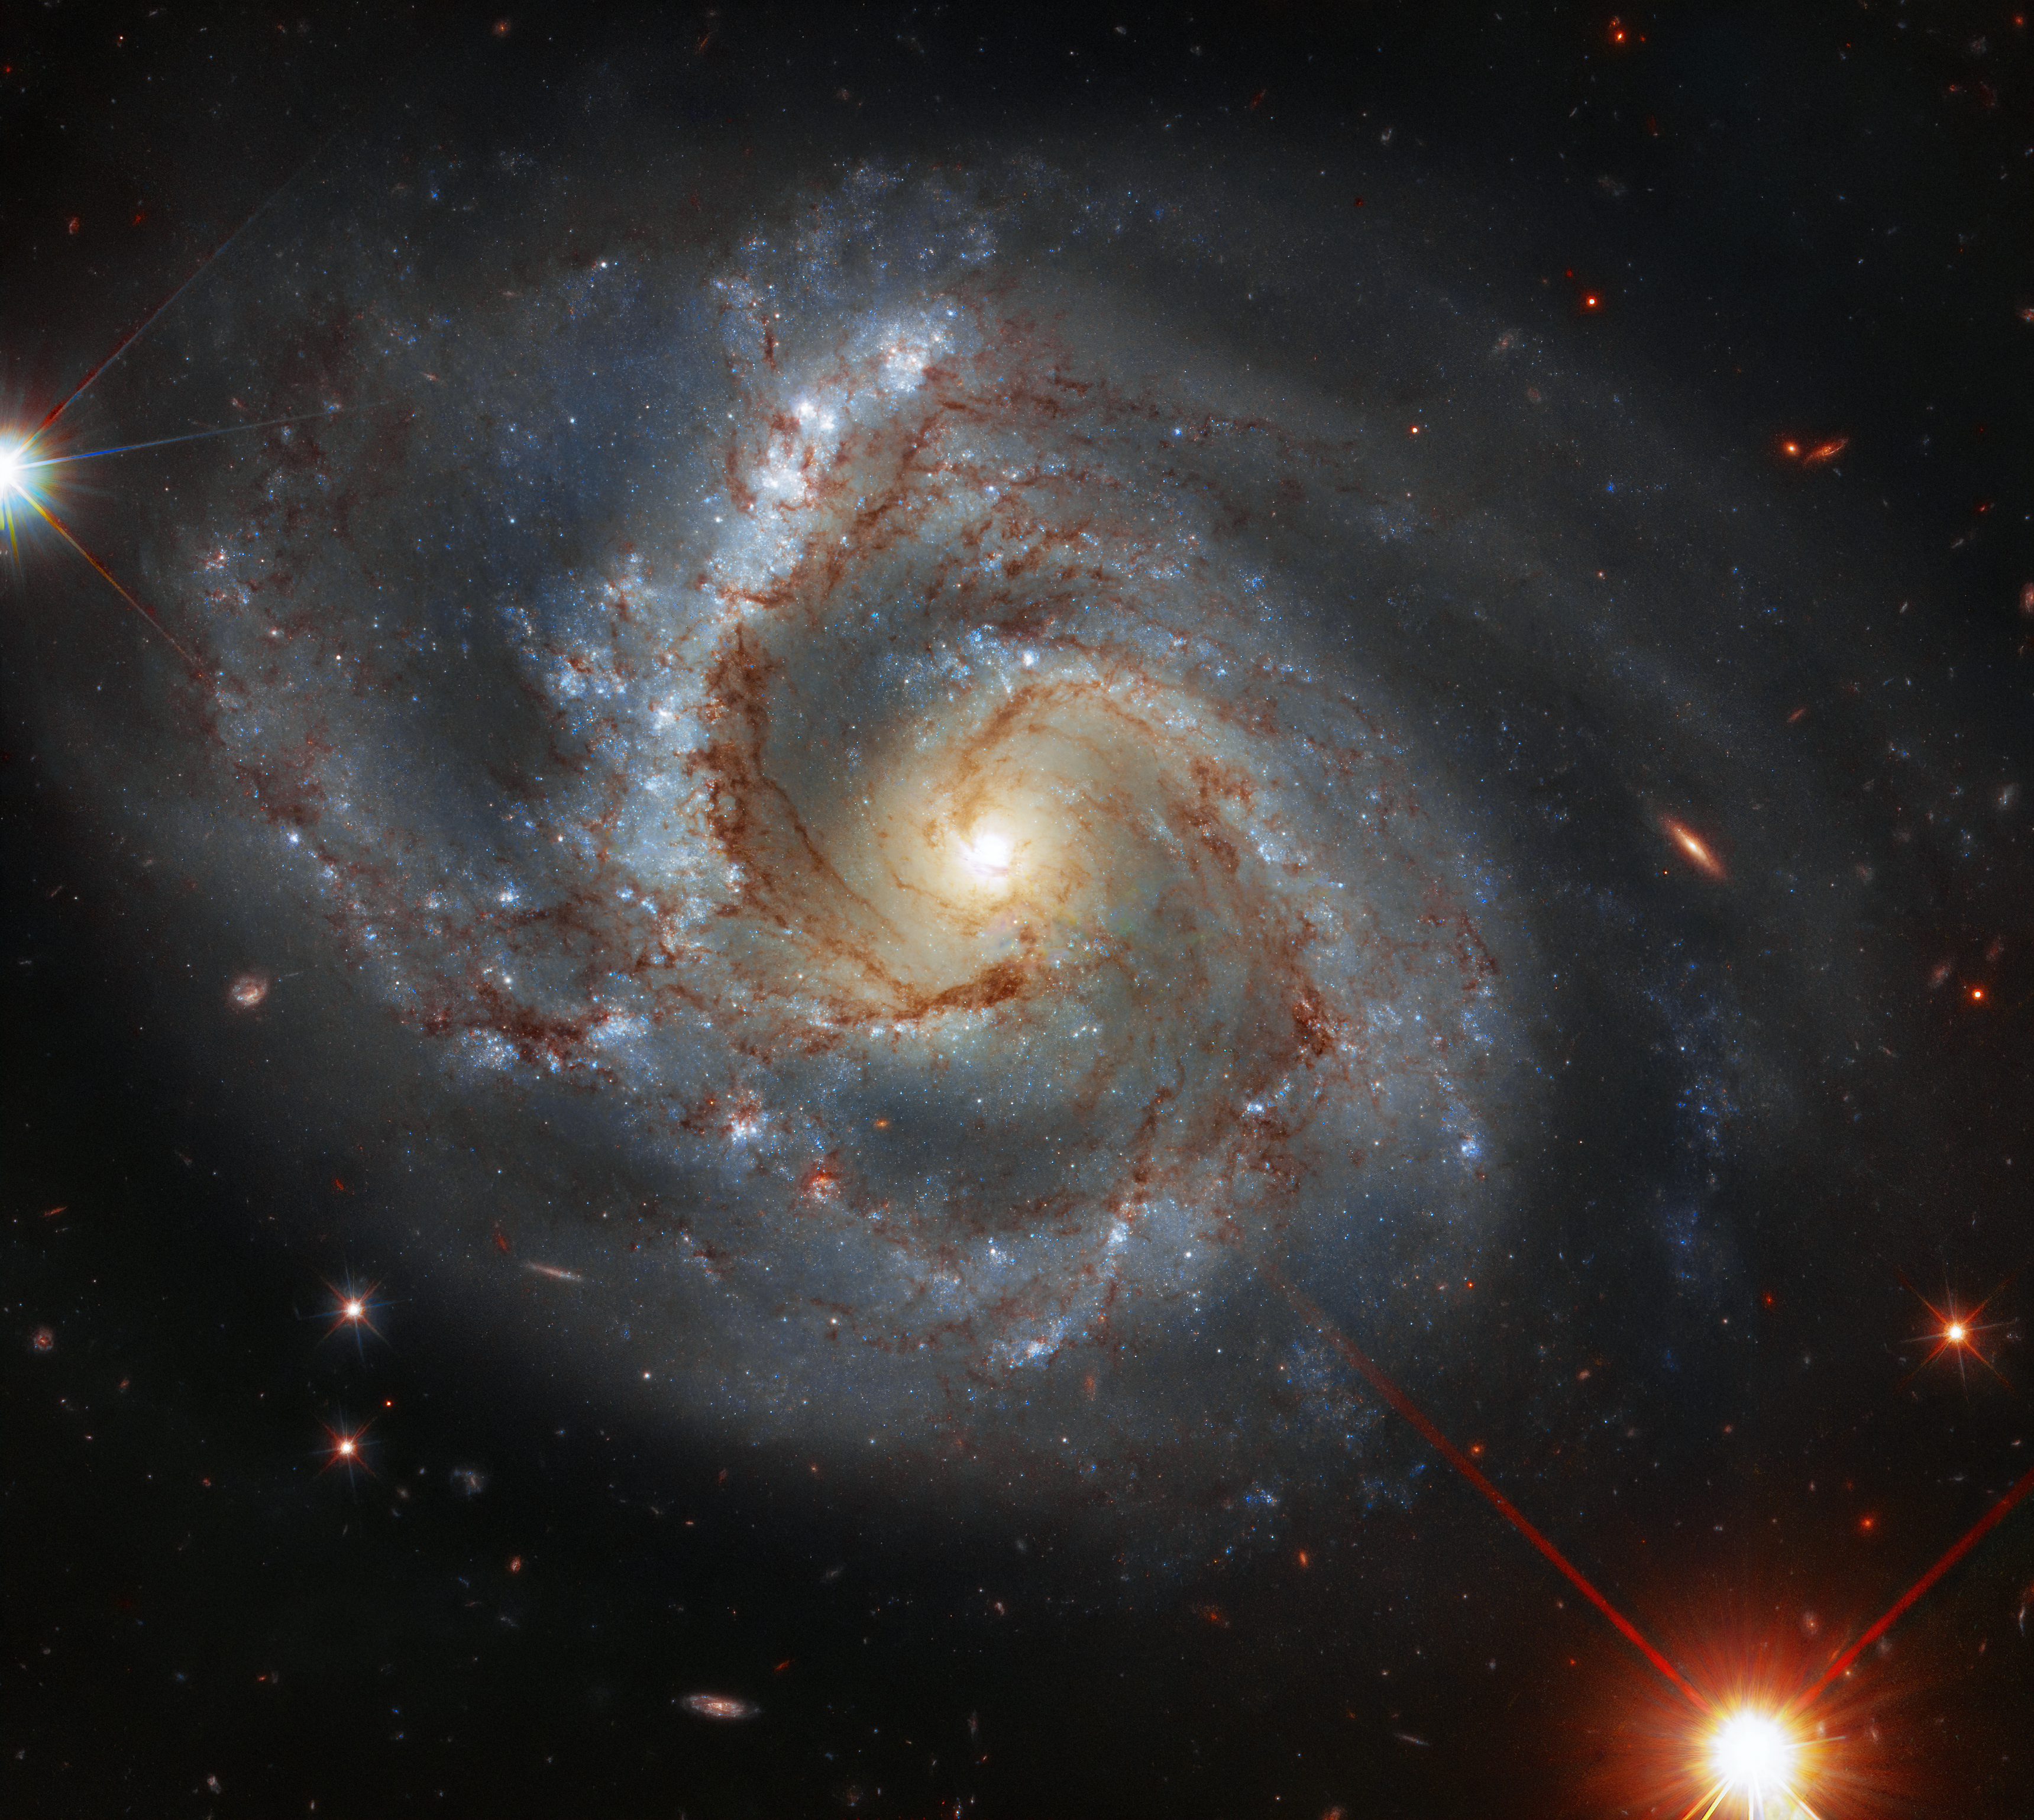

A Peculiar Sight

This week’s Hubble/ESA Picture of the Week features NGC 7678 — a galaxy located approximately 164 million light-years away in the constellation of Pegasus (The Winged Horse). With a diameter of around 115 000 light-years, this bright spiral galaxy is a similar size to our own galaxy (the Milky Way), and was discovered in 1784 by the German-British astronomer William Herschel.

The Atlas of Peculiar Galaxies is a catalogue which was produced in 1966 by the American astronomer Halton Arp. NGC 7678 is among the 338 galaxies presented in this catalogue, which organises peculiar galaxies according to their unusual features. Catalogued here as Arp 28, this galaxy is listed together with six others in the group “spiral galaxies with one heavy arm”.

Credit: ESA/Hubble & NASA, A. Riess et al.